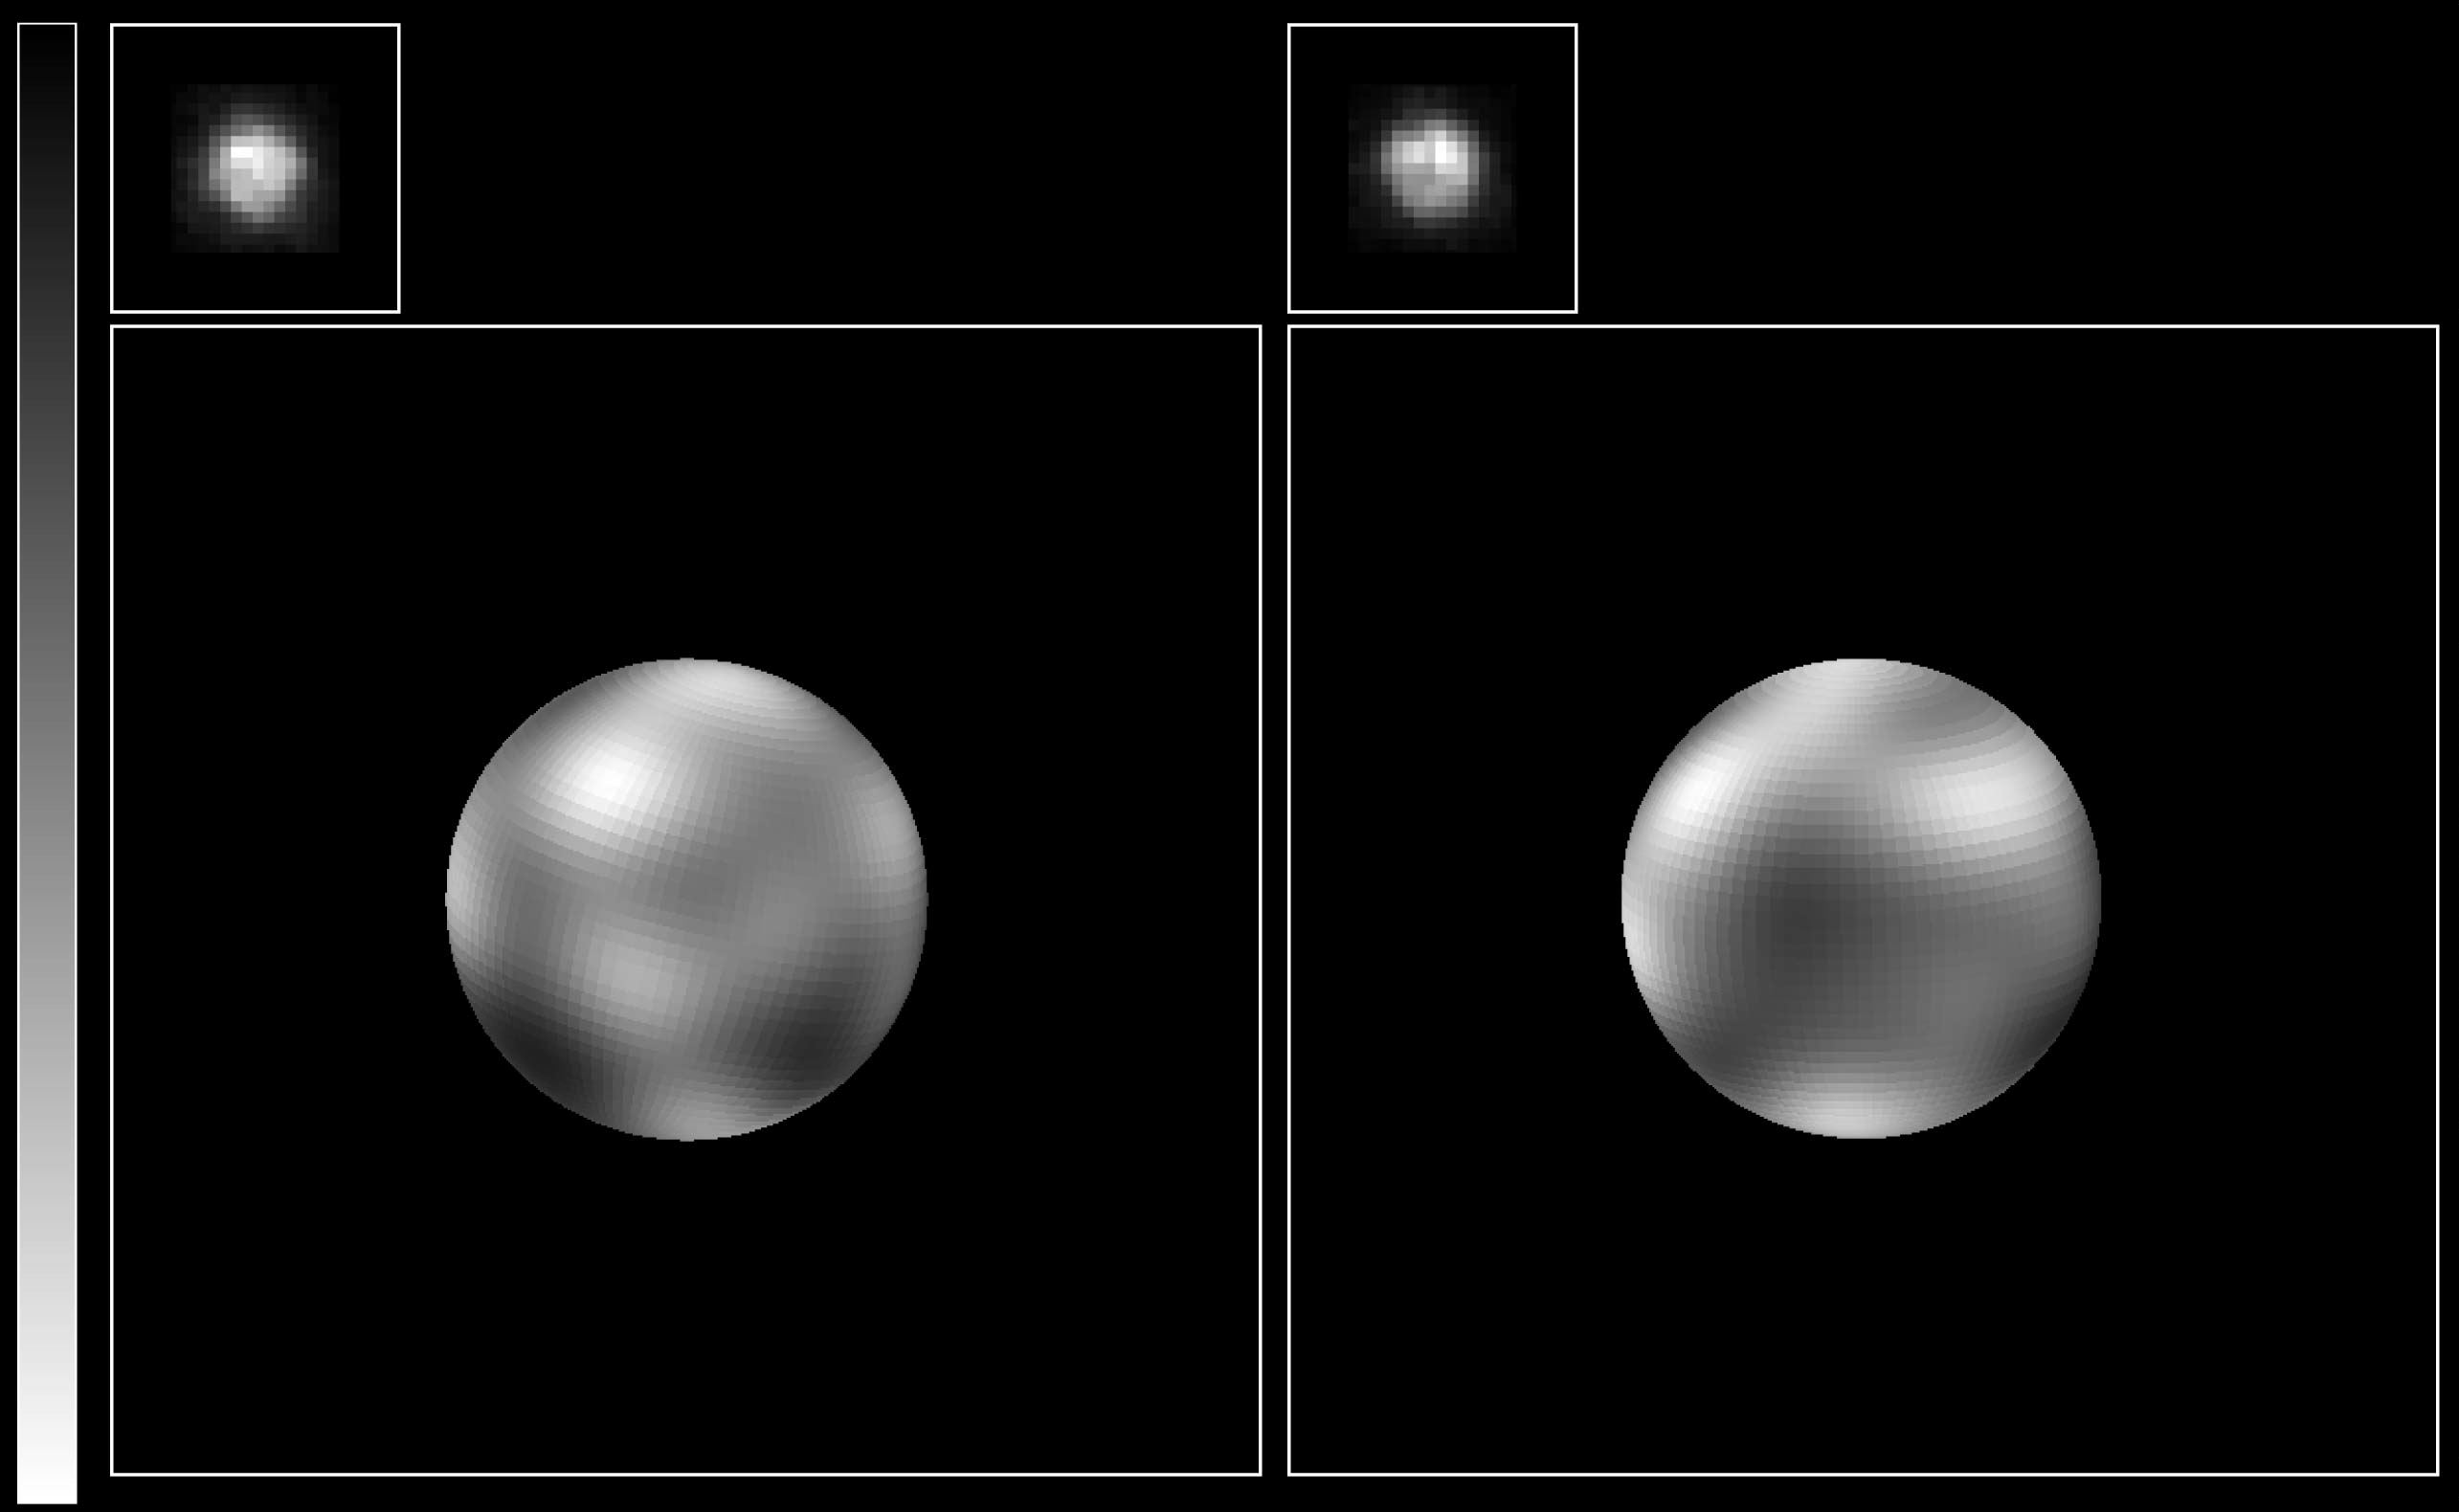

The Surface of Pluto

The never-before-seen surface of the distant planet Pluto is resolved in these NASA/ESA Hubble Space Telescope pictures, taken with the European Space Agency's (ESA) Faint Object Camera (FOC) aboard Hubble.

Credit: Alan Stern (Southwest Research Institute), Marc Buie (Lowell Observatory), NASA and ESA